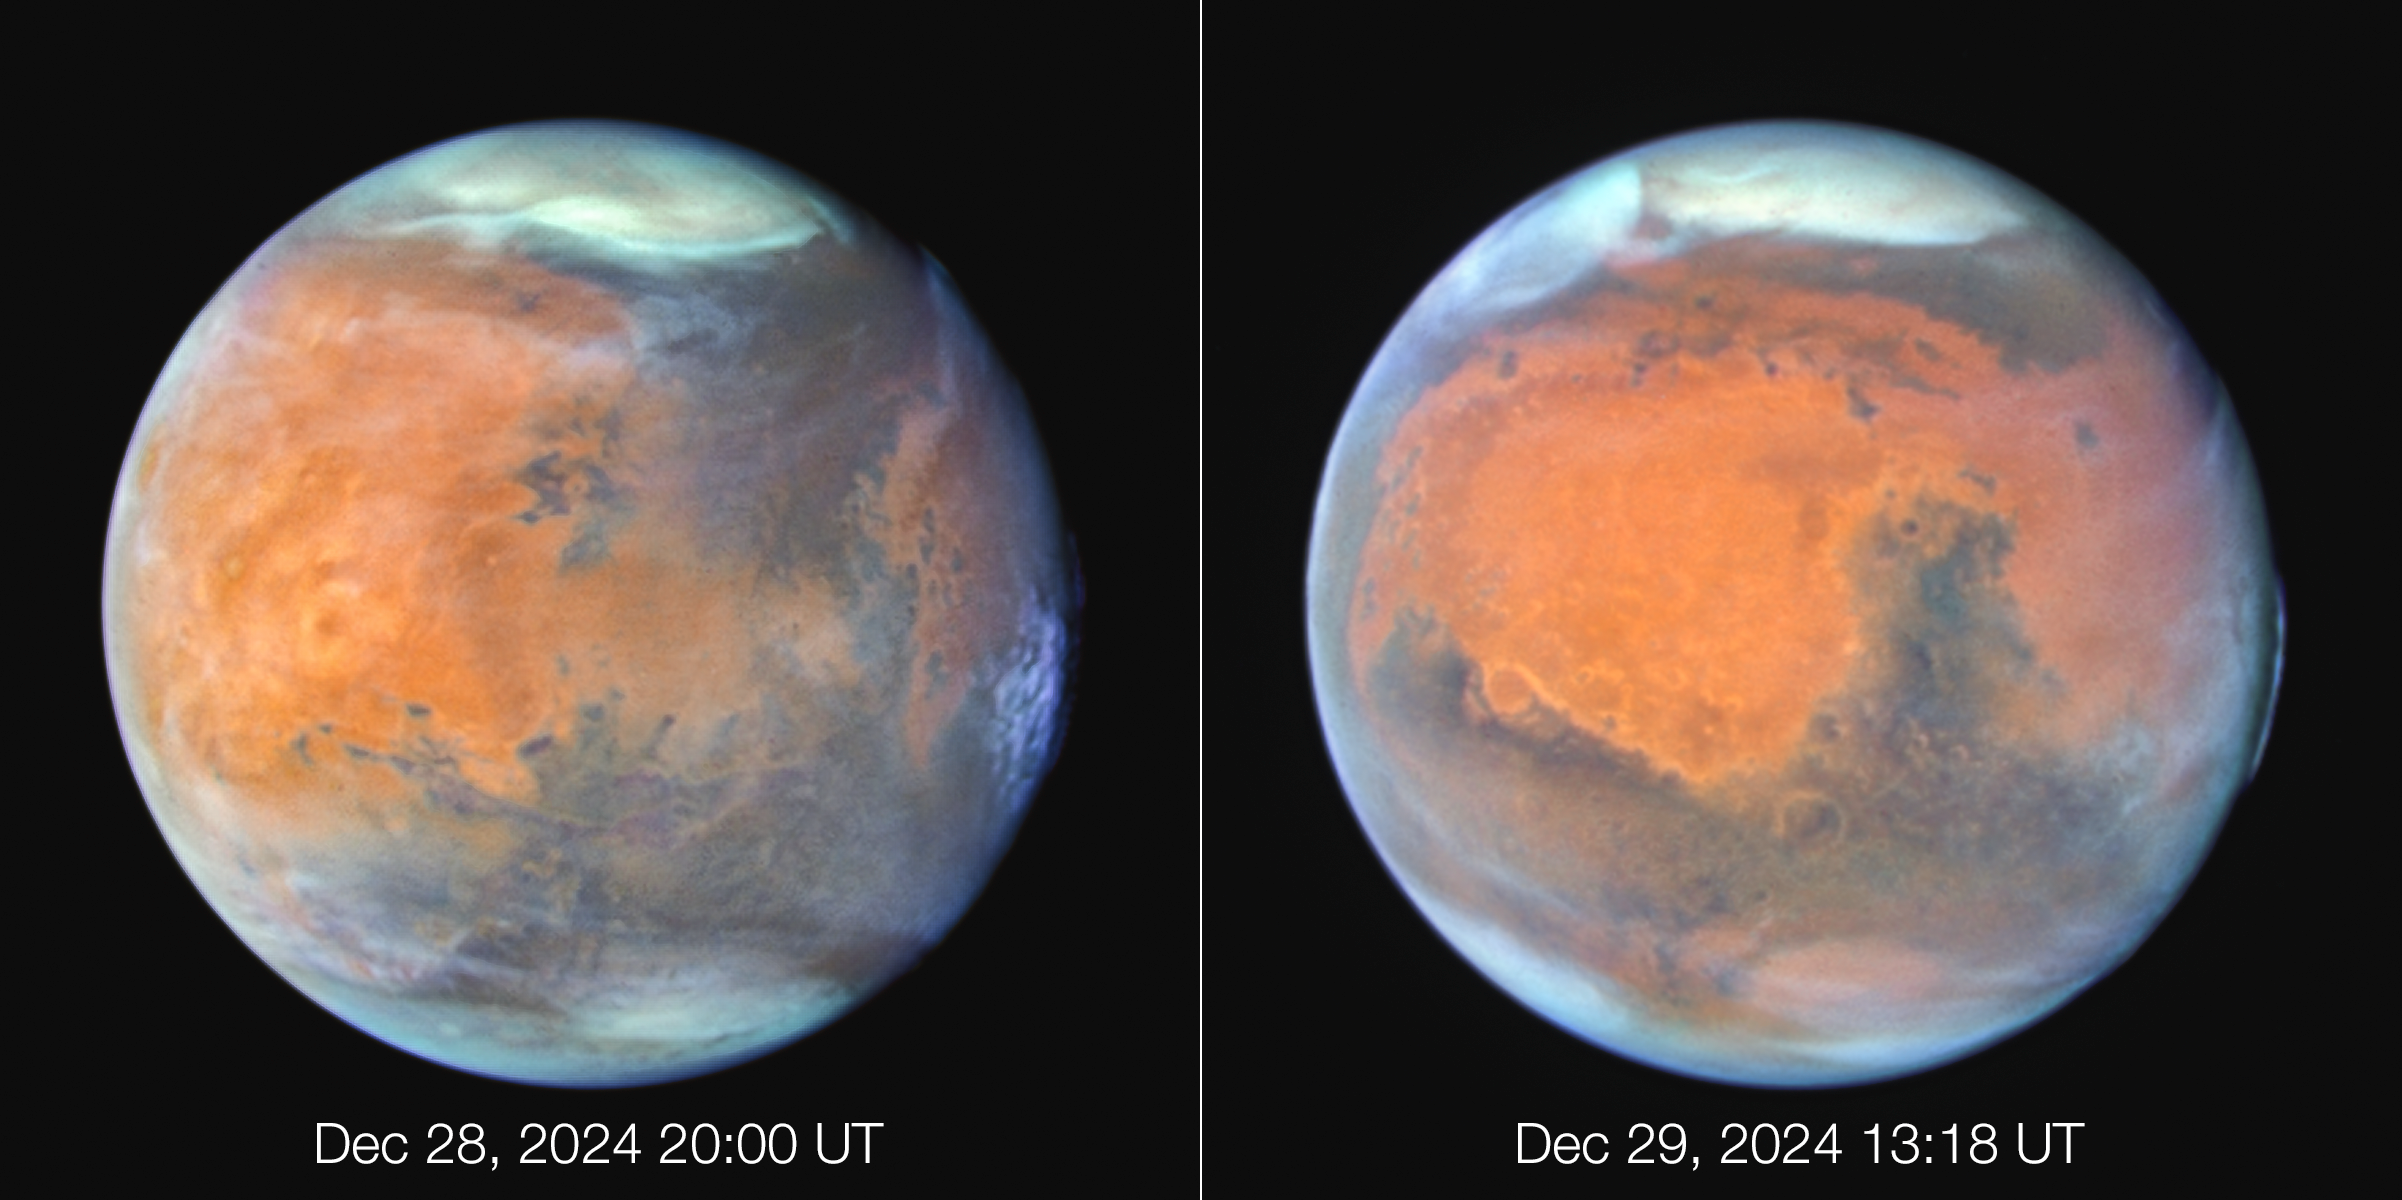

Mars (December 2024)

This is a combination of Hubble Space Telescope images of Mars taken from December 28th to 30th, 2024. At the midpoint of the observations, Mars was approximately 98 million kilometres from Earth. Thin water-ice clouds that are apparent in ultraviolet light give the Red Planet a frosty appearance. The icy northern polar cap was experiencing the start of Martian spring.

In the left image, the bright orange Tharsis plateau is visible with its chain of dormant volcanoes. The largest volcano, Olympus Mons, pokes above the clouds at the 10 o’clock position near the northwest limb. At an elevation of 21 000 metres, it is 2.5 times the height of Mt. Everest above sea level. Valles Marineris, Mars’ roughly 4,000 kilometre-long canyon system, is a dark, linear, horizontal feature near center left.

In the right image, high-altitude evening clouds can be seen along the planet’s eastern limb. The 2,250-kilometre-wide Hellas basin, an ancient asteroid impact feature, appears far to the south. Most of the hemisphere is dominated by the classical “shark fin” feature, Syrtis Major.

Credit: NASA, ESA, STScI